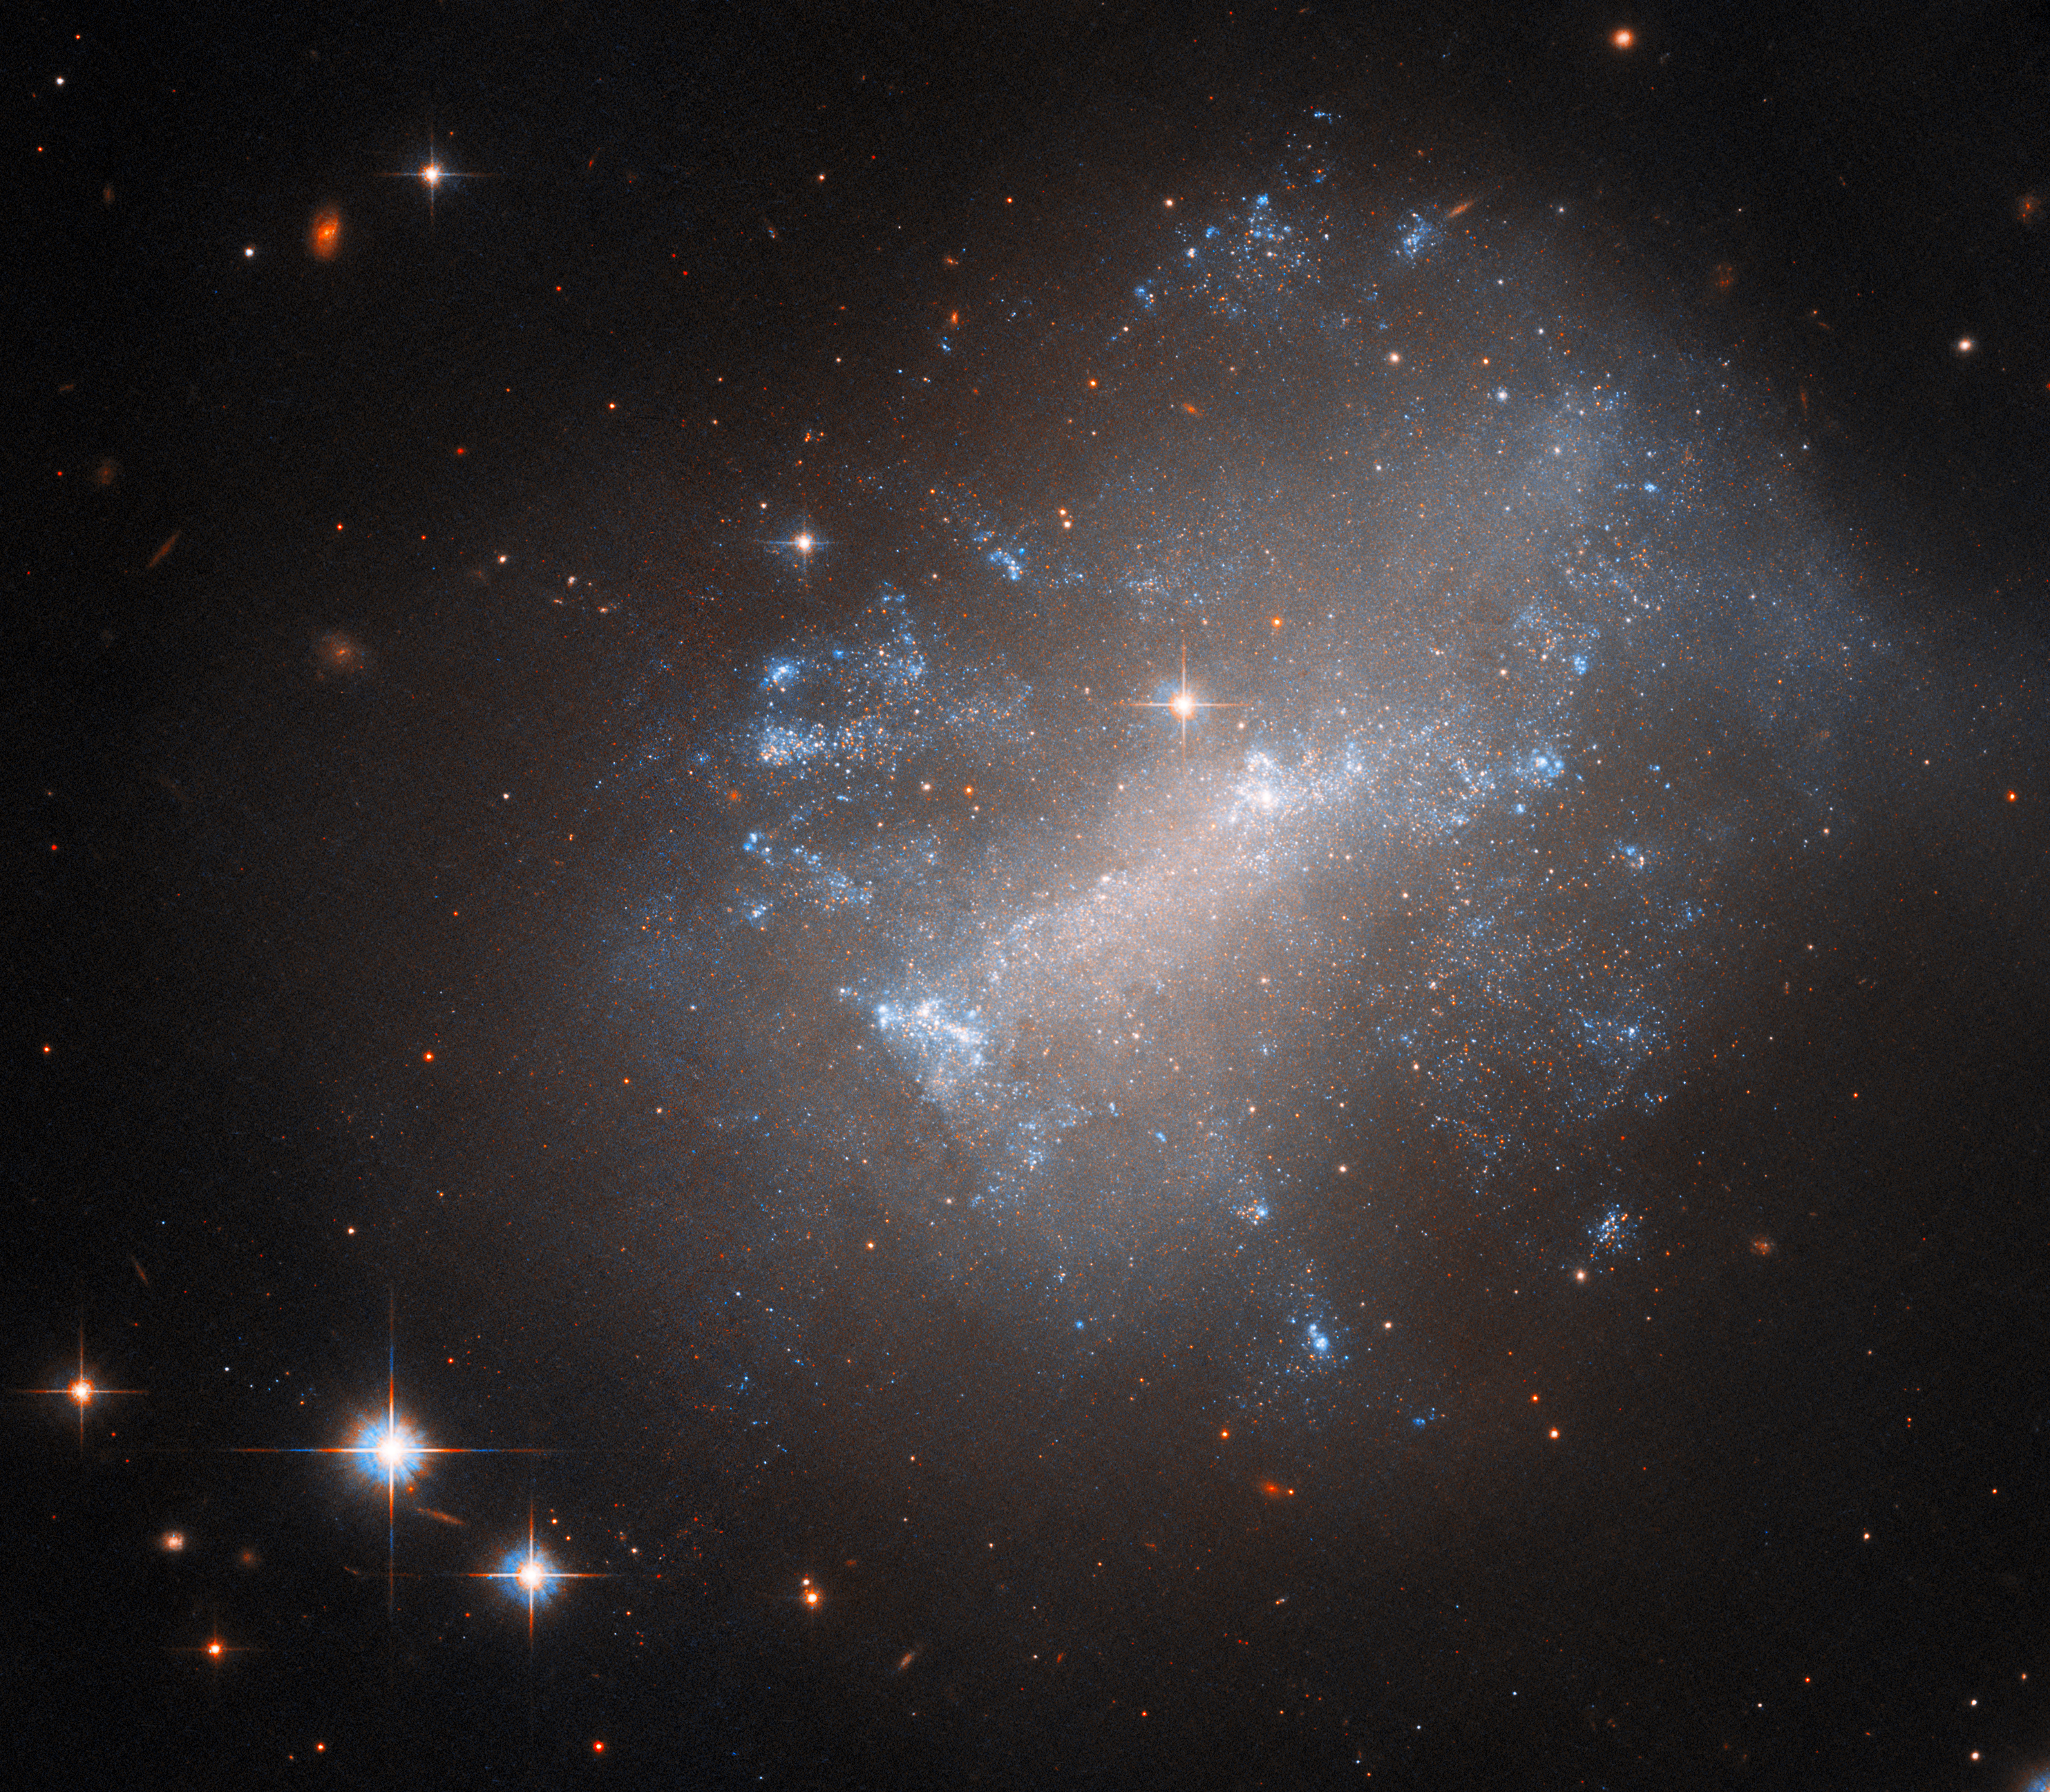

A dishevelled irregular galaxy

The galaxy NGC 7292 billows across this image from the NASA/ESA Hubble Space Telescope, accompanied by a handful of bright stars and the indistinct smudges of extremely distant galaxies in the background. It lies around 44 million light-years from Earth in the constellation Pegasus.

This slightly dishevelled galaxy is irregular, meaning that it lacks the distinct spiral arms of galaxies like the Whirlpool Galaxy or the smooth elliptical shape of galaxies like Messier 59. Unusually, its core is stretched out into a distinct bar, a feature seen in many spiral galaxies. Alongside its hazy shape, NGC 7292 is remarkably faint. As a result, astronomers classify NGC 7292 as a low surface brightness galaxy, barely distinguishable against the backdrop of the night sky. Such galaxies are typically dominated by gas and dark matter rather than stars.

Astronomers directed Hubble to inspect NGC 7292 during an observational campaign studying the aftermath of Type II supernovae. These colossal explosions happen when a massive star collapses and then violently rebounds in a catastrophic explosion that tears the star apart. Astronomers hope to learn more about the diversity of Type II supernovae they have observed by scrutinising the aftermath and remaining nearby stars of a large sample of historical Type II supernovae.

NGC 7292’s supernova was observed in 1964 and accordingly given the identifier SN 1964H. Studying the stellar neighbourhood of SN 1964H helps astronomers estimate the initial mass of the star that went supernova, and could uncover surviving stellar companions that once shared a system with the star that would become SN 1964H.

Credit: ESA/Hubble & NASA, C. Kilpatrick